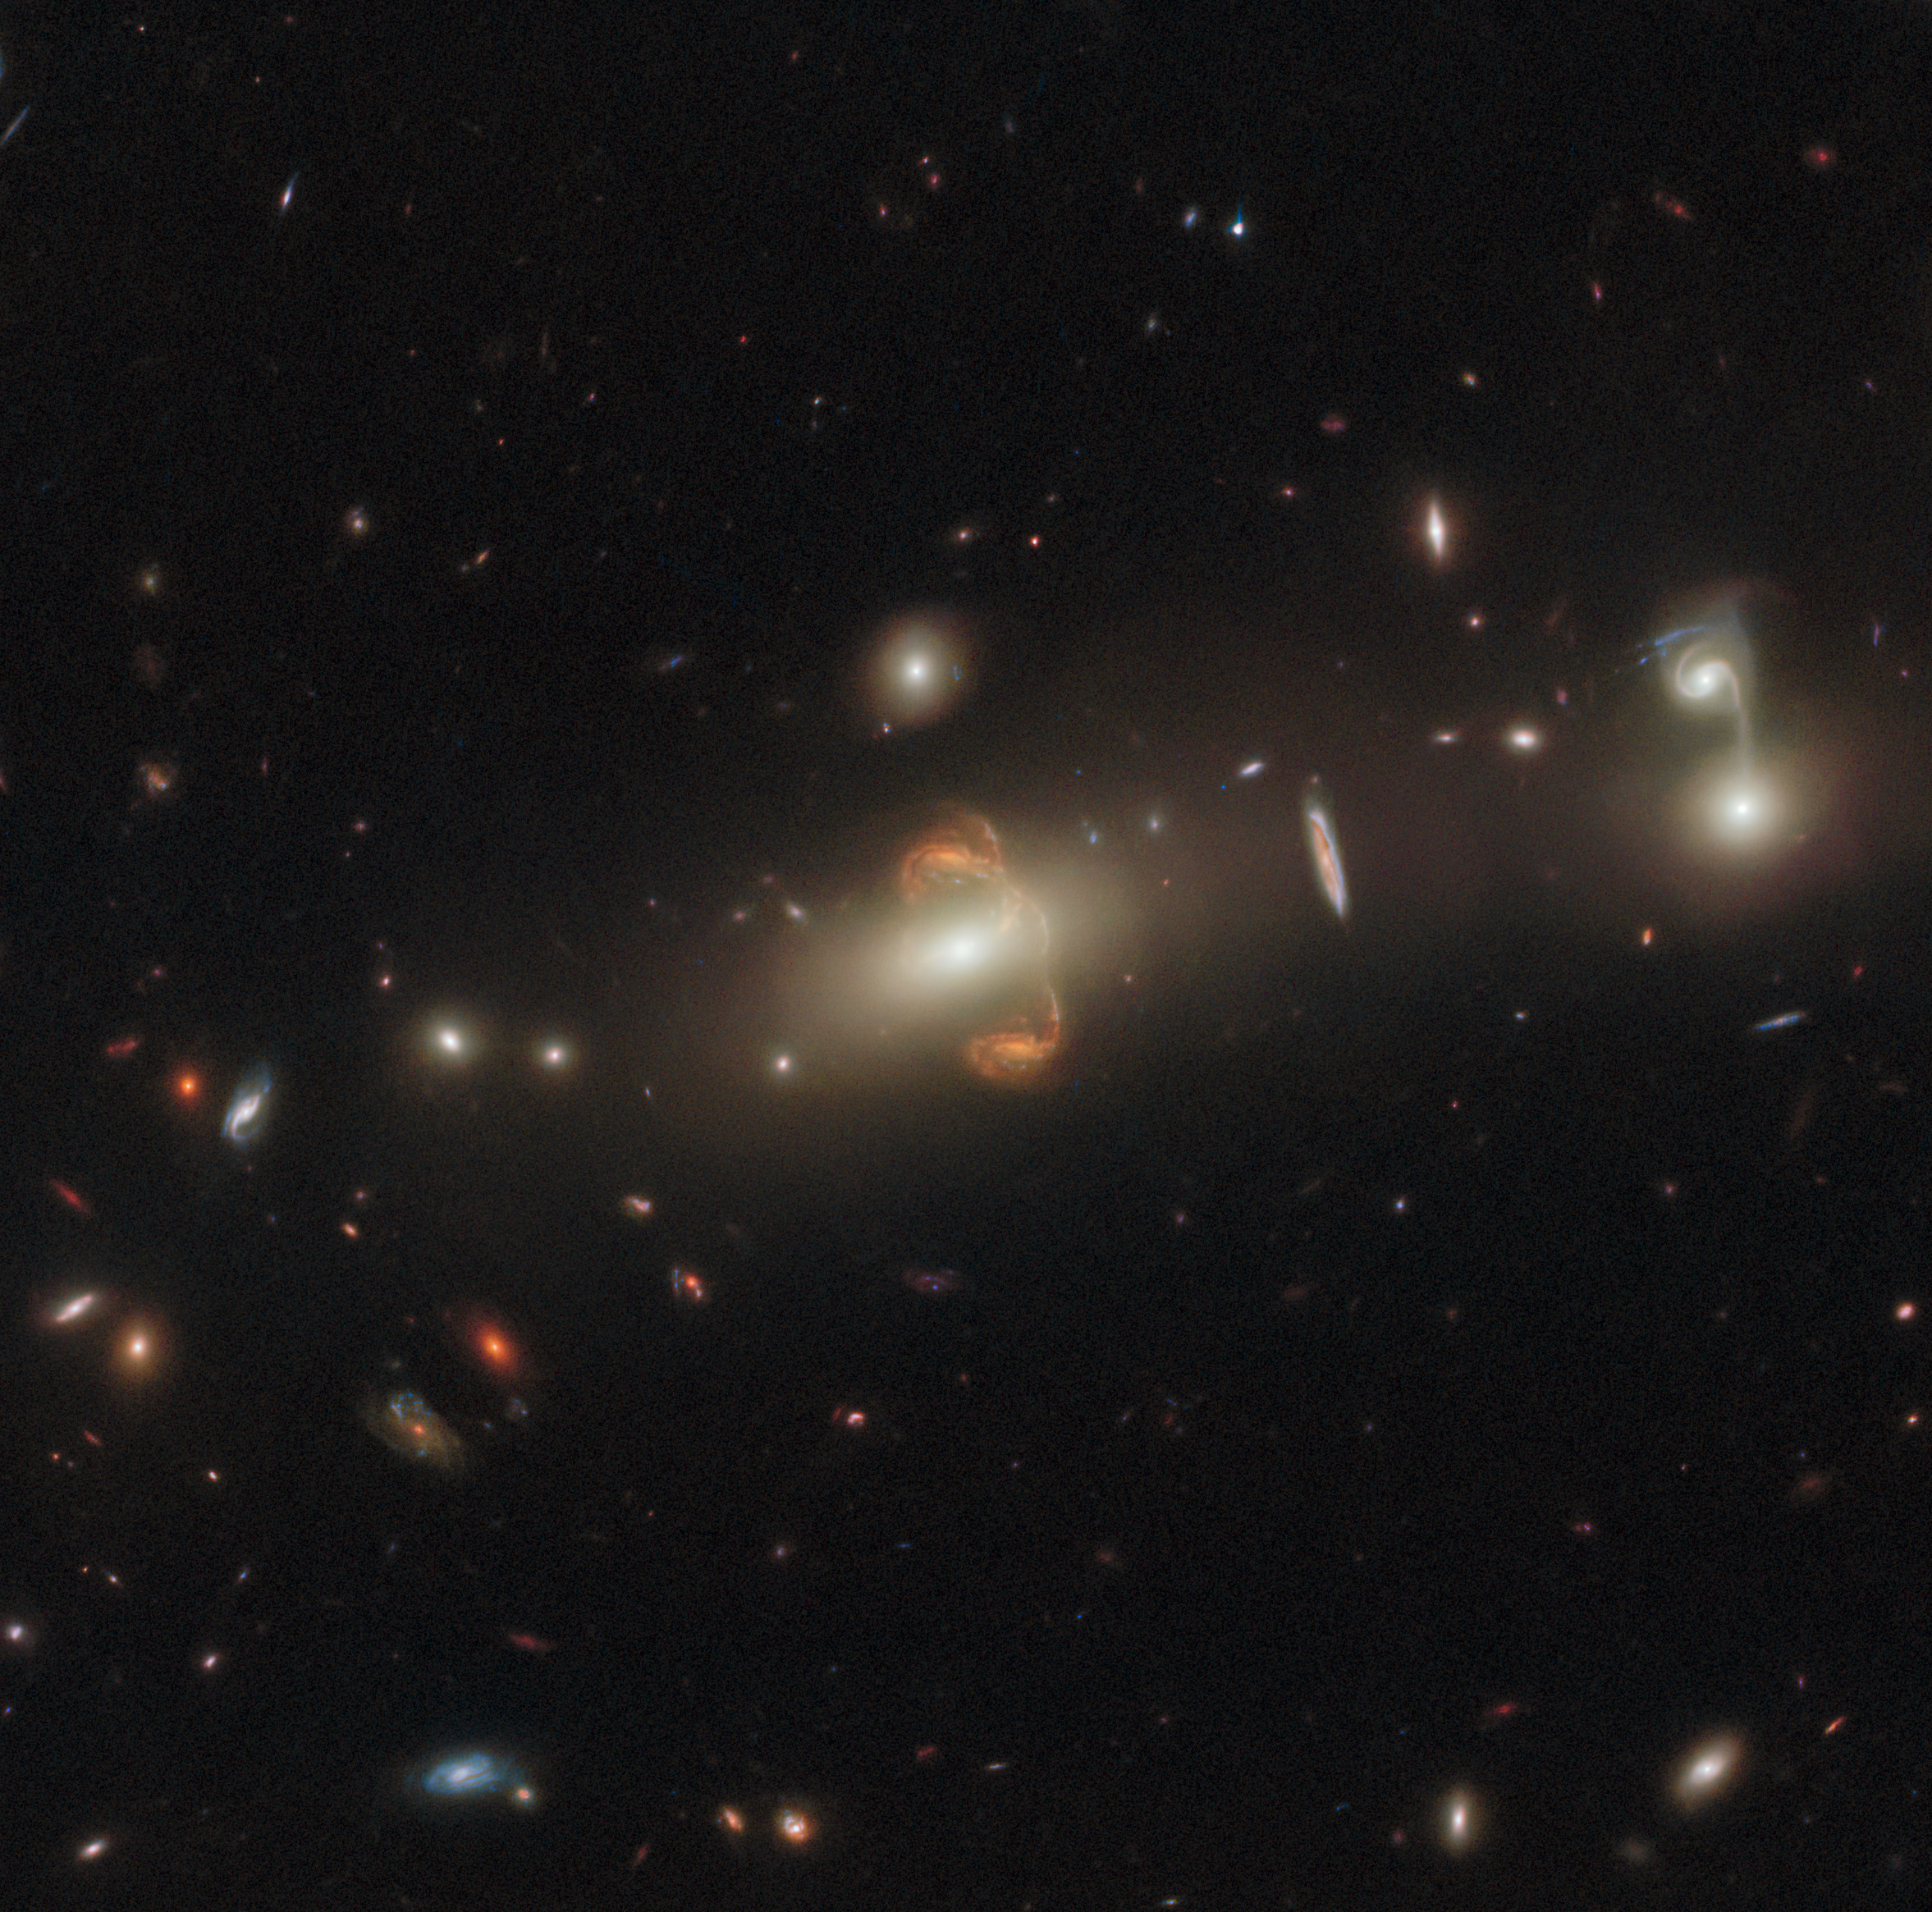

Lens Flair

This intriguing observation from the NASA/ESA Hubble Space Telescope shows a gravitationally lensed galaxy with the long-winded identification SGAS J143845+145407. Gravitational lensing has resulted in a mirror image of the galaxy at the centre of this image, creating a captivating centrepiece.

Gravitational lensing occurs when a massive celestial body — such as a galaxy cluster — causes a sufficient curvature of spacetime for the path of light around it to be visibly bent, as if by a lens. Appropriately, the body causing the light to curve is called a gravitational lens, and the distorted background object is referred to as being "lensed". Gravitational lensing can result in multiple images of the original galaxy, as seen in this image, or in the background object appearing as a distorted arc or even a ring. Another important consequence of this lensing distortion is magnification, allowing astronomers to observe objects that would otherwise be too far away or too faint to be seen.

Hubble has a special flair for detecting lensed galaxies. The telescope's sensitivity and crystal-clear vision allow it to see faint and distant gravitational lenses that cannot be detected with ground-based telescopes because of the blurring effect of Earth's atmosphere. Hubble was the first telescope to resolve details within lensed images of galaxies, and is capable of imaging both their shape and internal structure.

This particular lensed galaxy is from a set of Hubble observations that take advantage of gravitational lensing to peer inside galaxies in the early Universe. The lensing reveals details of distant galaxies that would otherwise be unobtainable, and this allows astronomers to determine star formation in early galaxies. This in turn gives scientists a better insight into how the overall evolution of galaxies has unfolded.

Credit: ESA/Hubble & NASA, J. Rigby